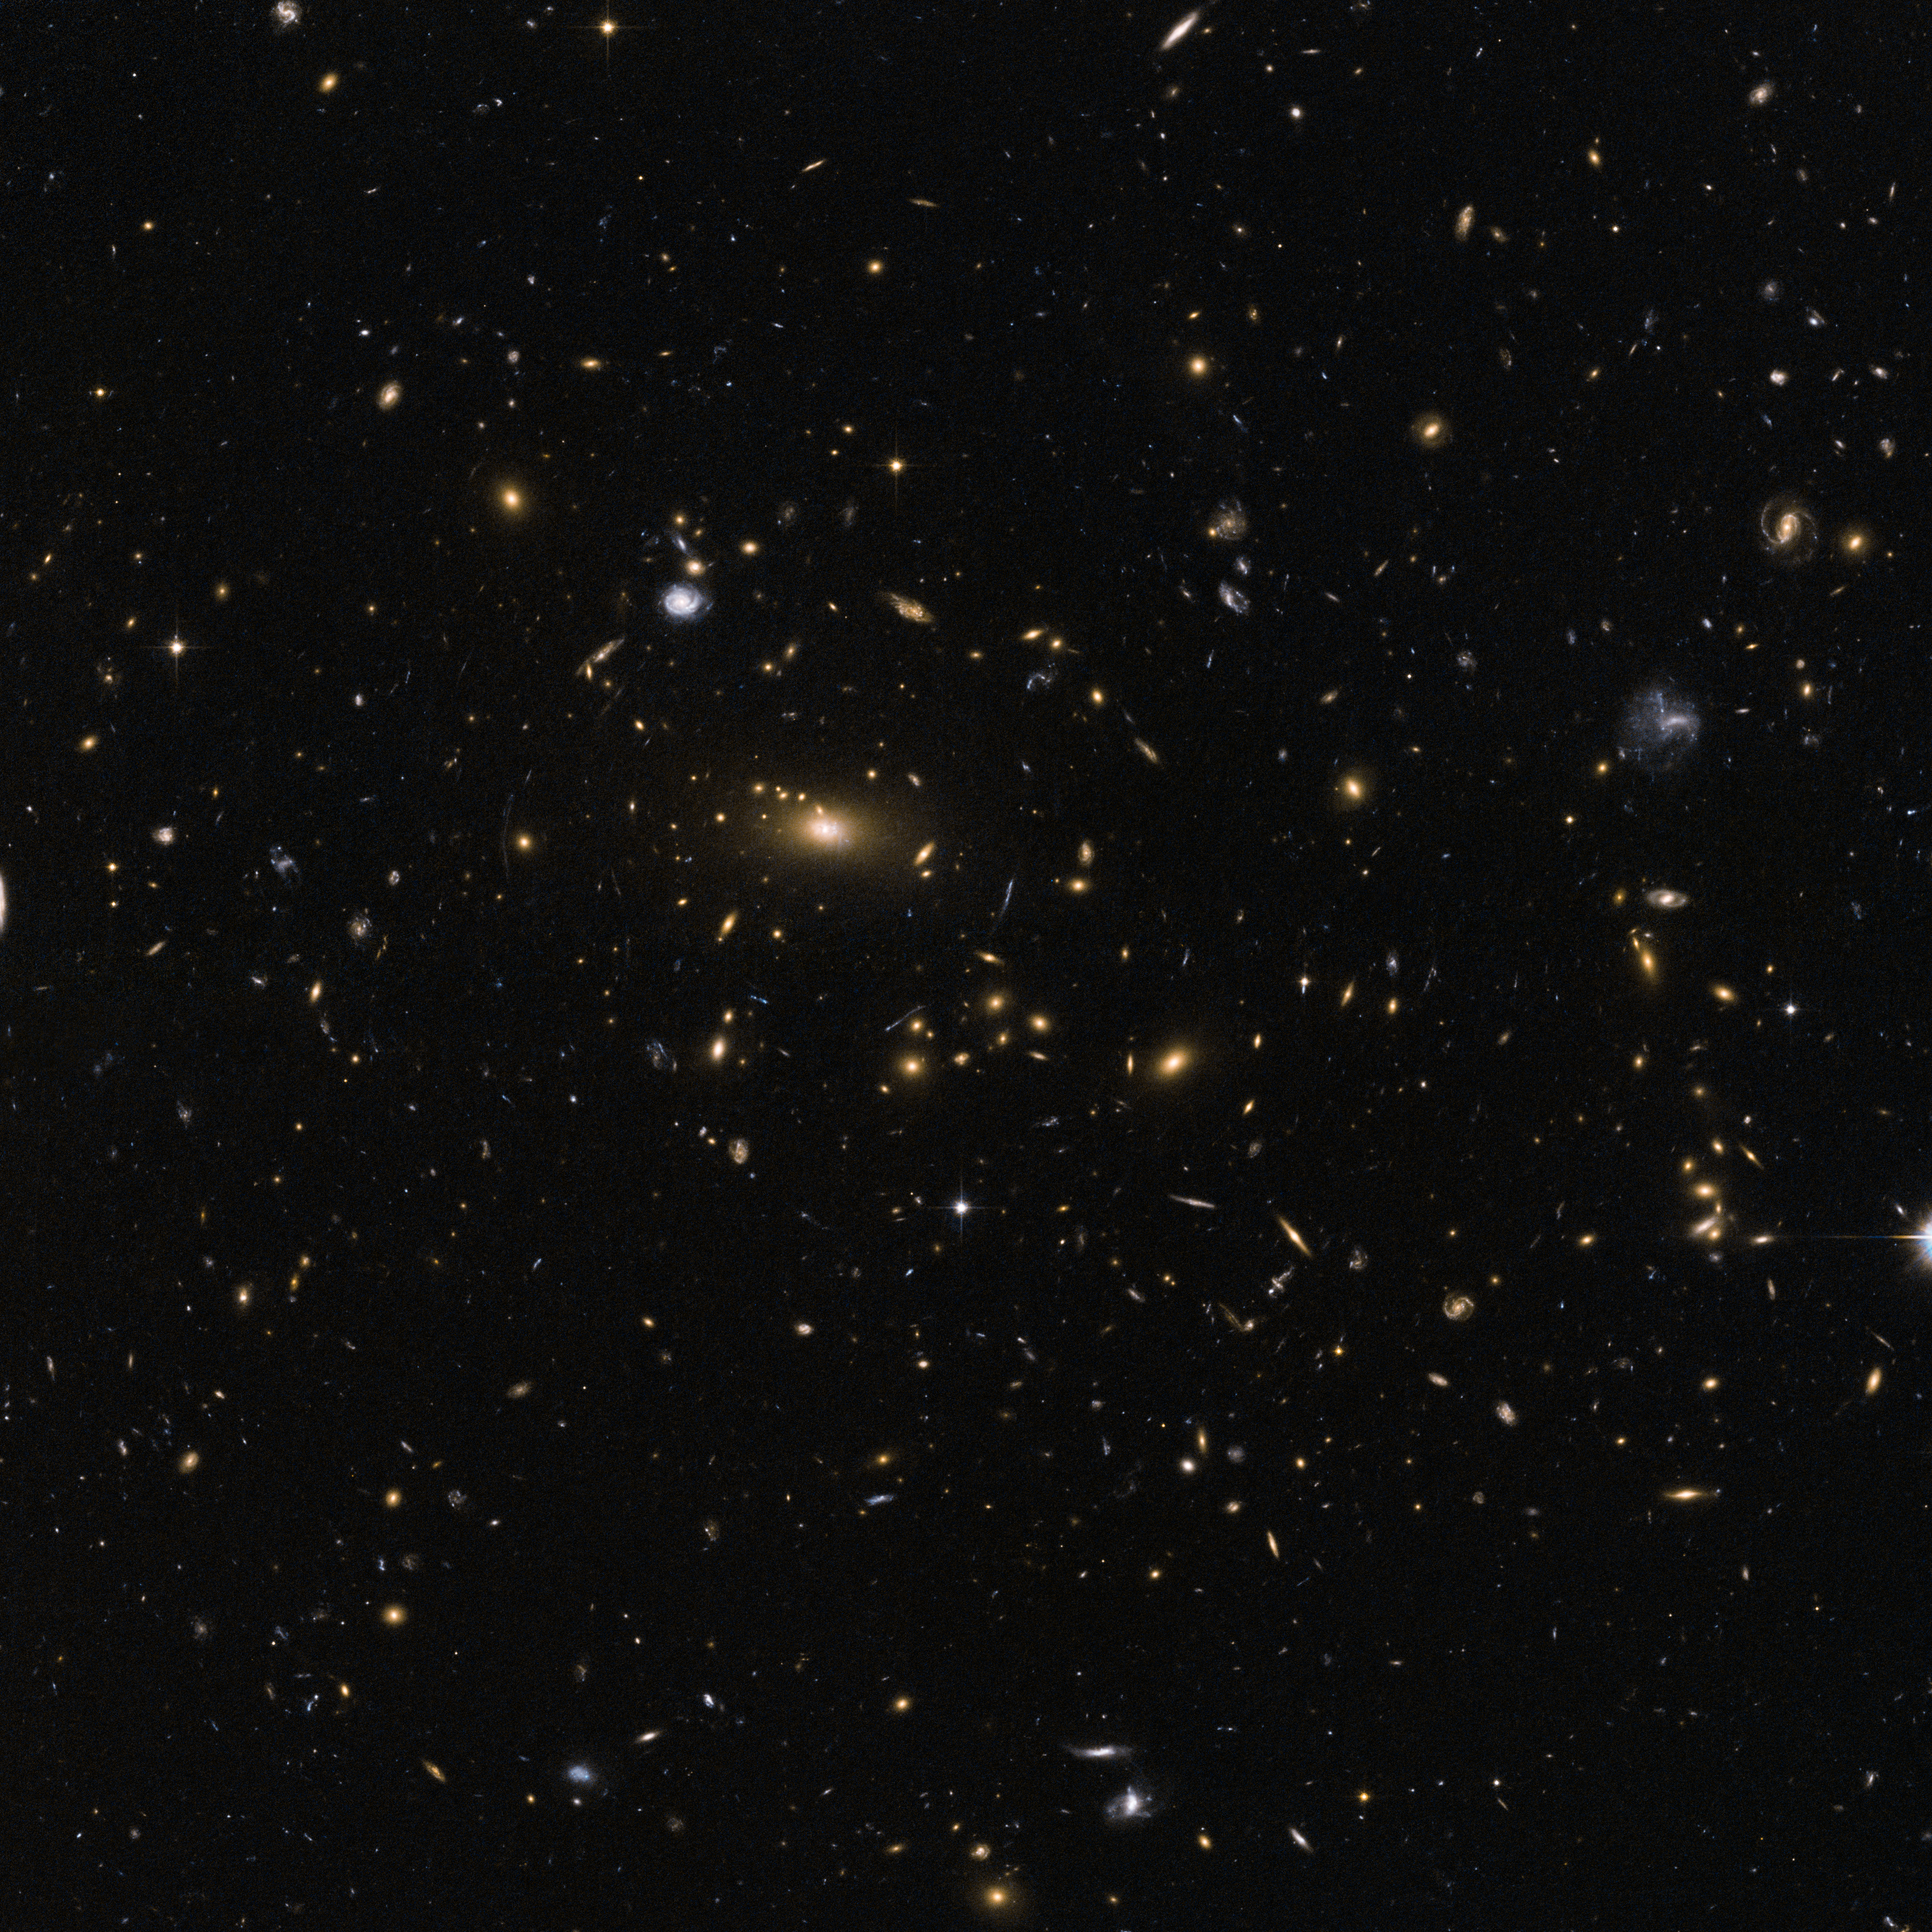

Galactic moths drawn to a bright light

Smaller, dimmer galaxies appear to flit like moths around a radiant street light in this image captured by the NASA/ESA Hubble Space Telescope. The brilliant central object is a supergiant elliptical galaxy, the dominant member of a galaxy cluster with the mouthful of a name MACSJ1423.8+2404. This great swarm of galaxies is located about five billion light-years away in the constellation Boötes (the Herdsman). MACSJ1423.8+2404 and other distant galaxy clusters offer astronomers a peek into the earlier days of our Universe when these colossal groupings were still taking shape. Over the 13.7 billion-year history of the cosmos, such galaxy clusters have emerged as the largest observed gravitationally bound structures.

But there is much more than meets the eye when it comes to galaxy clusters — they also hint at the vast majority of the Universe’s substance that we have not yet directly detected. Astronomers study clusters such as MACSJ1423.8+2404 to better understand the influence of dark energy, a mysterious force credited with accelerating the expansion of the Universe and accounting for some 72 percent of the mass of the Universe.

The application of what we can see and detect to the study of what we cannot does not end there with MACSJ1423.8+2404 and its ilk. Dark matter, estimated to account for about 23 percent of the mass of the Universe, exists in great quantities in galaxy clusters. The “normal” matter that comprises stars, planets and us trickles in at less than 5 percent.

Astronomers observe clusters to study how this dark matter gravitationally gathers visible matter and underpins these vast cosmic metropolises. The galactic moths are drawn to the clusters not by their light, but by the vast unseen reservoir of dark matter.

This image was created from images taken using the Wide Field Channel of Hubble’s Advanced Camera for Surveys. The exposures were 75 and 76 minutes respectively, through yellow (F555W) and near-infrared (F814W) filters. The field of view is 3.2 arcminutes across.

Credit: ESA/Hubble and NASA